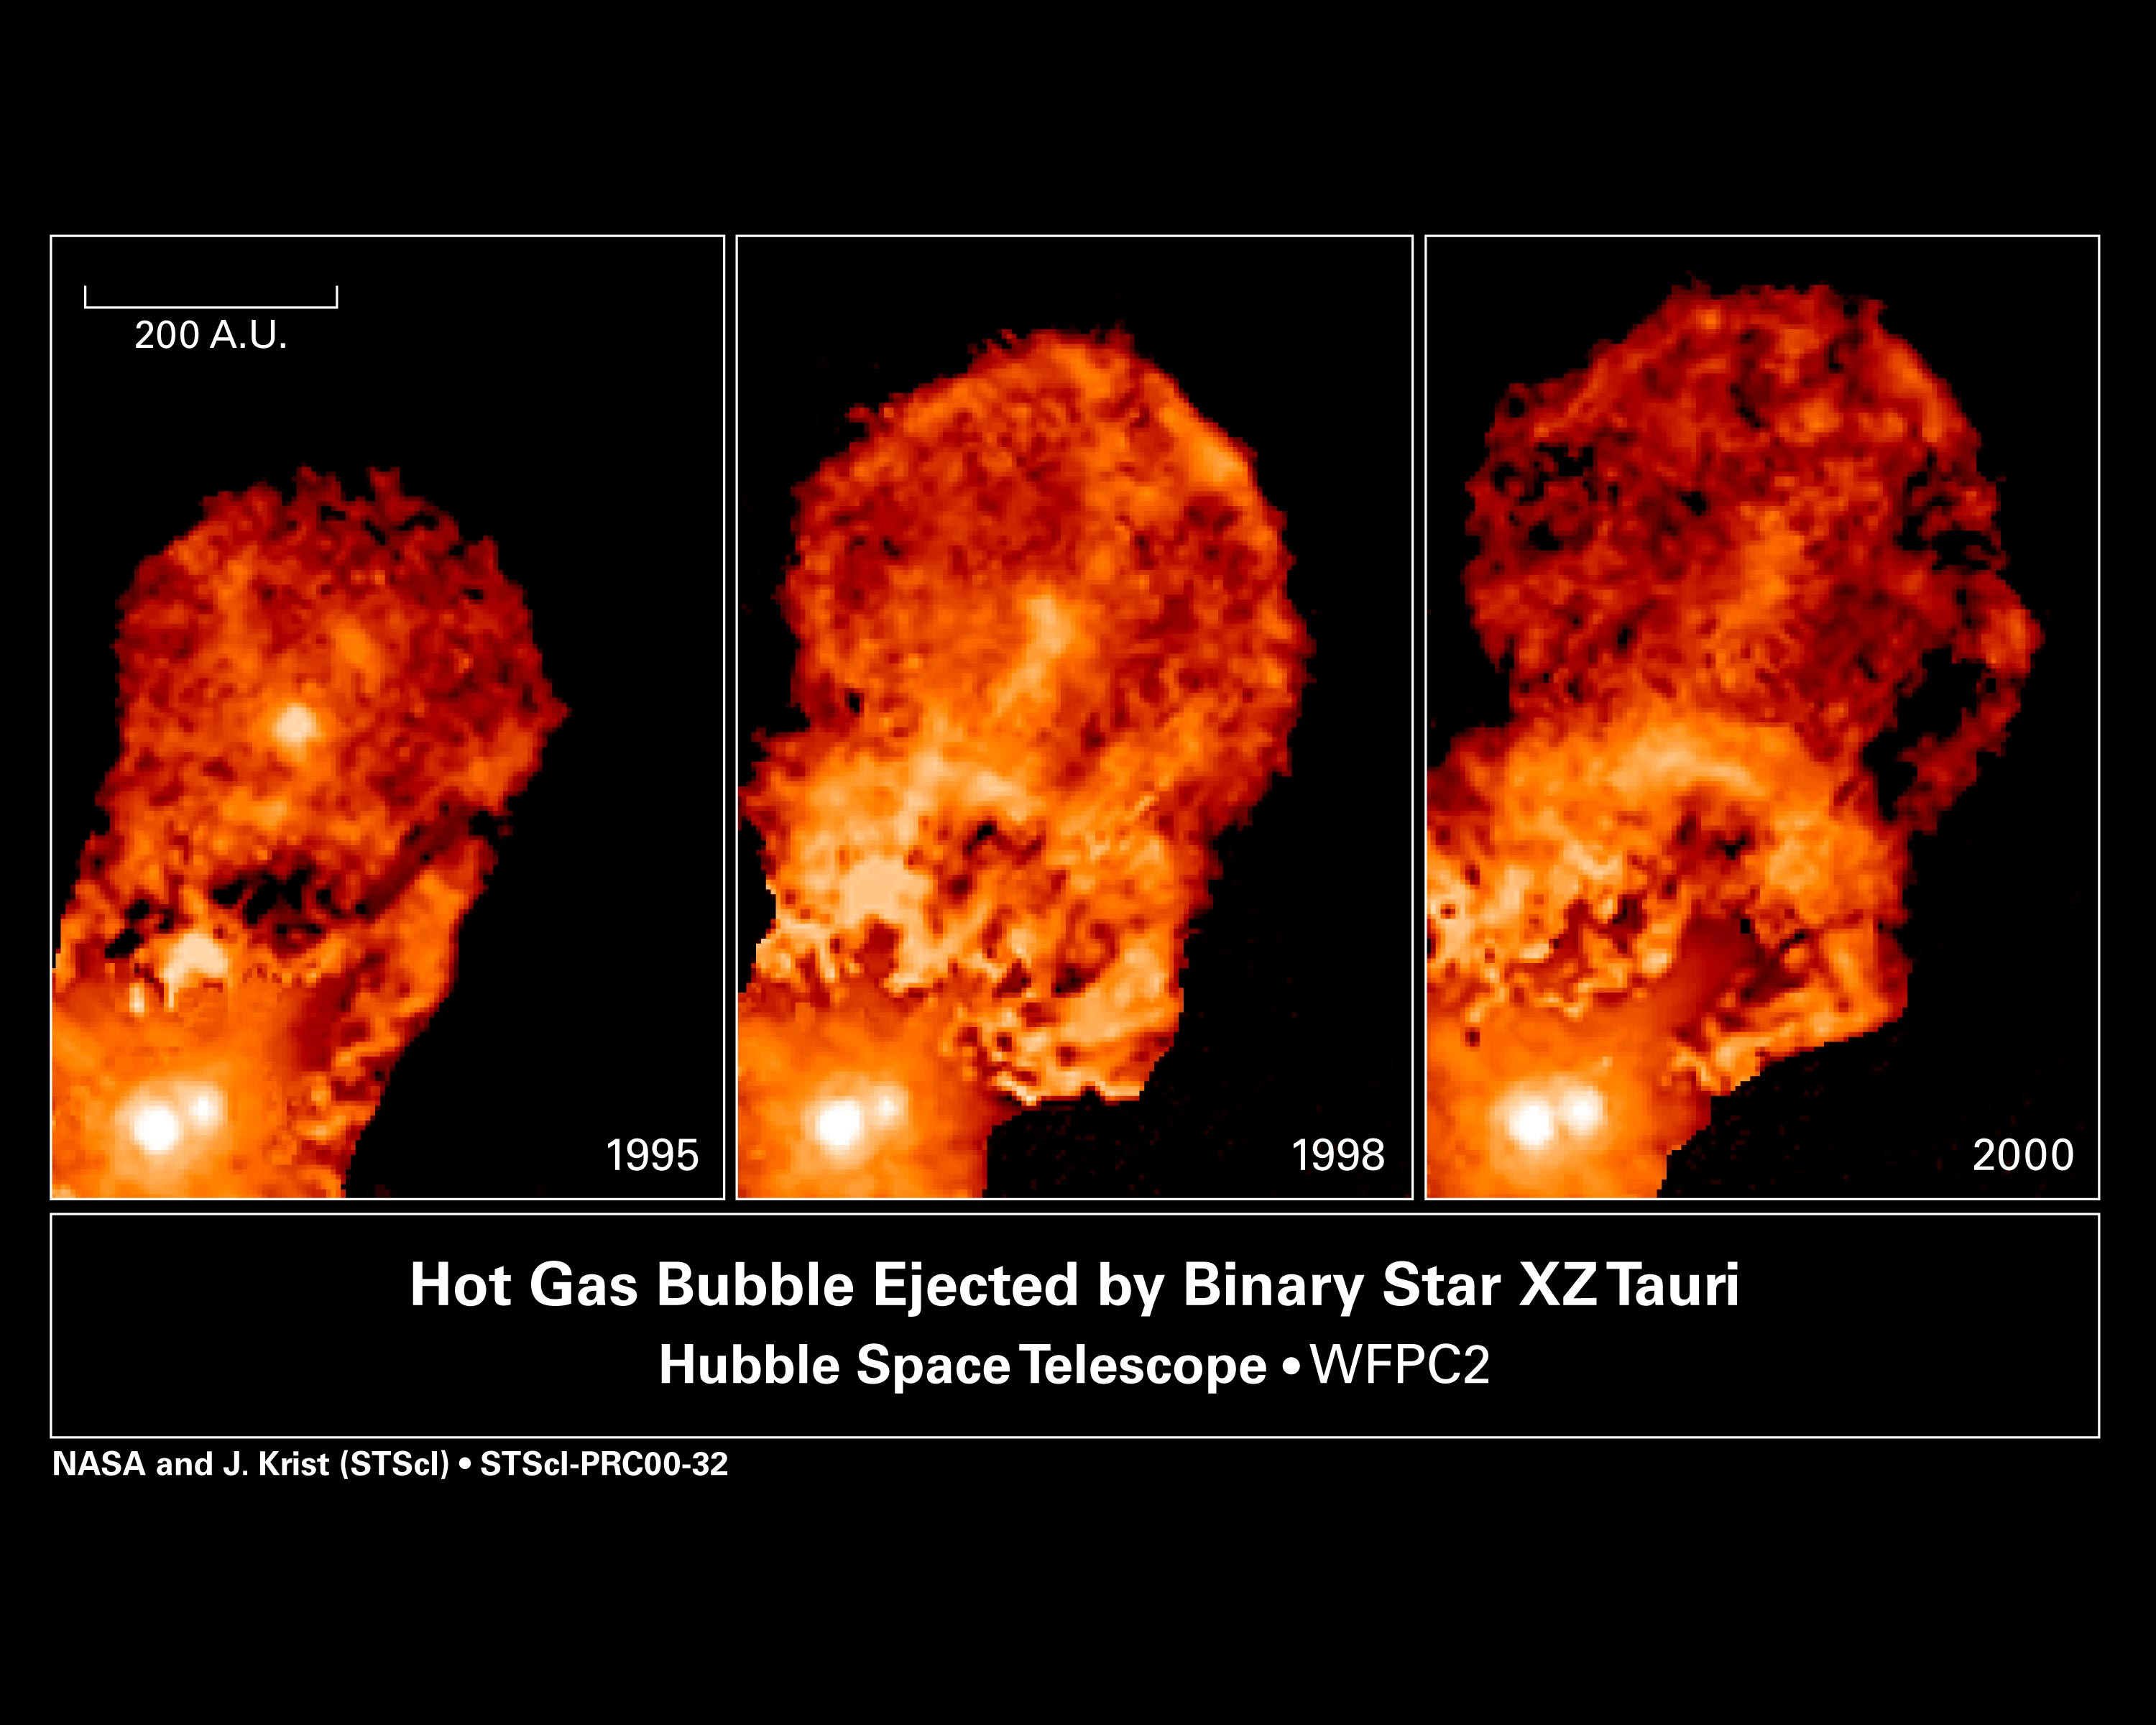

Binary star XZ Tauri

These images taken with the Hubble Space Telescope's Wide Field and Planetary Camera 2reveal the evolution of bubbles of glowing gas being blown out from the young binary star system XZ Tauri. Gas from an unseen disk around one or both of the stars is channeled through magnetic fields surrounding the binary system and then is forced out into space at nearly 300, 000 miles per hour (540, 000 kilometers per hour). This outflow, which is only about 30 years old, extends nearly 60 billion miles (96 billion kilometers).

Credit: NASA, John Krist ( Space Telescope Science Institute), Karl Stapelfeldt (Jet Propulsion Laboratory), Jeff Hester (Arizona State University), Chris Burrows (European Space Agency/ Space Telescope Science Institute).